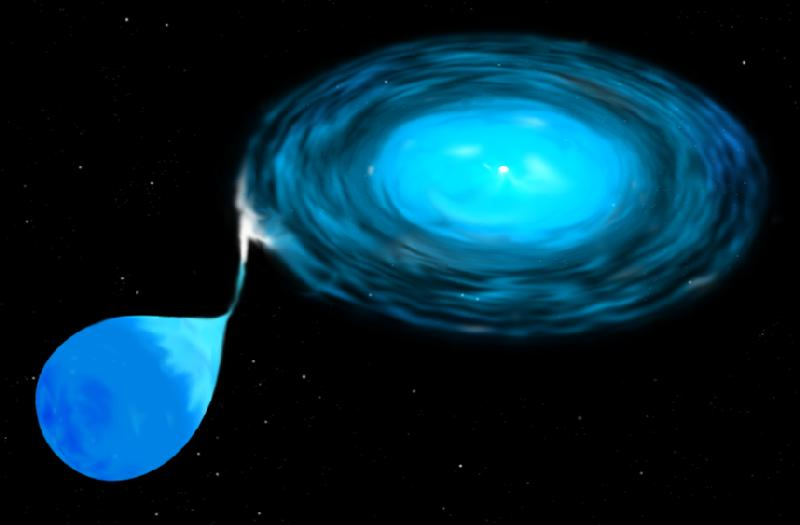

Cataclysmic Variable Star (artist's impression)

This is an illustration of a class of double star called a cataclysmic variable. The system consists of a white dwarf star - a dense, burned-out star that has collapsed to the size of Earth and a companion that is a normal star, similar to but smaller than the Sun.

Credit: STScI